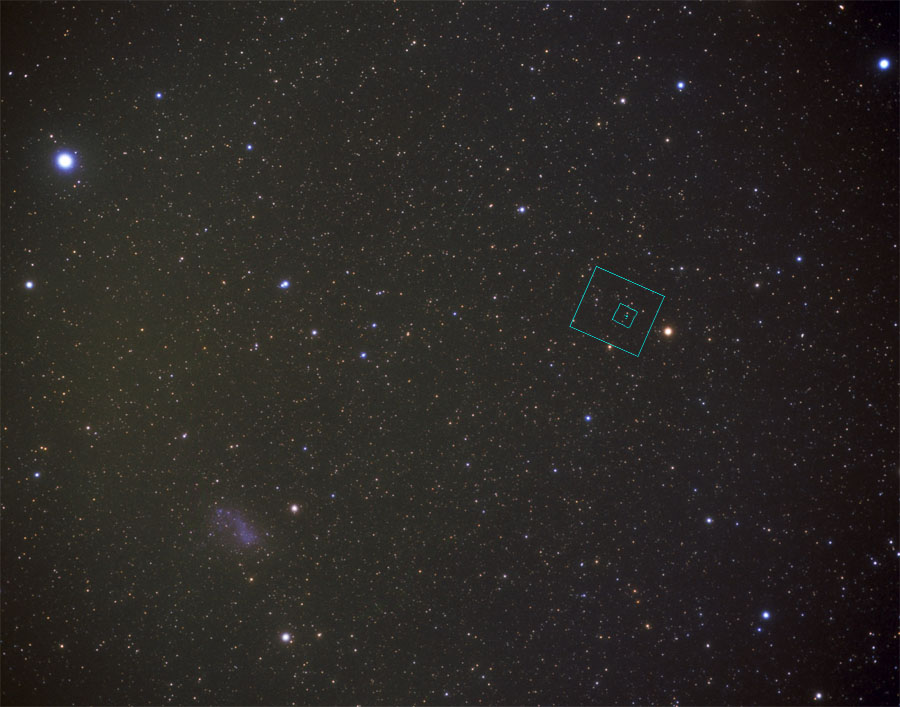

Location of the HDF South on the Sky with Overlay (ground-based image)

This image marks the location of the Hubble Deep Field South. This area, the subject of Hubble's gaze, is a 12- billion-light-year-long corridor loaded with a dazzling assortment of thousands of never-before-seen galaxies.

Credit: Akira Fujii, courtesy Sky and Telescope Magazine